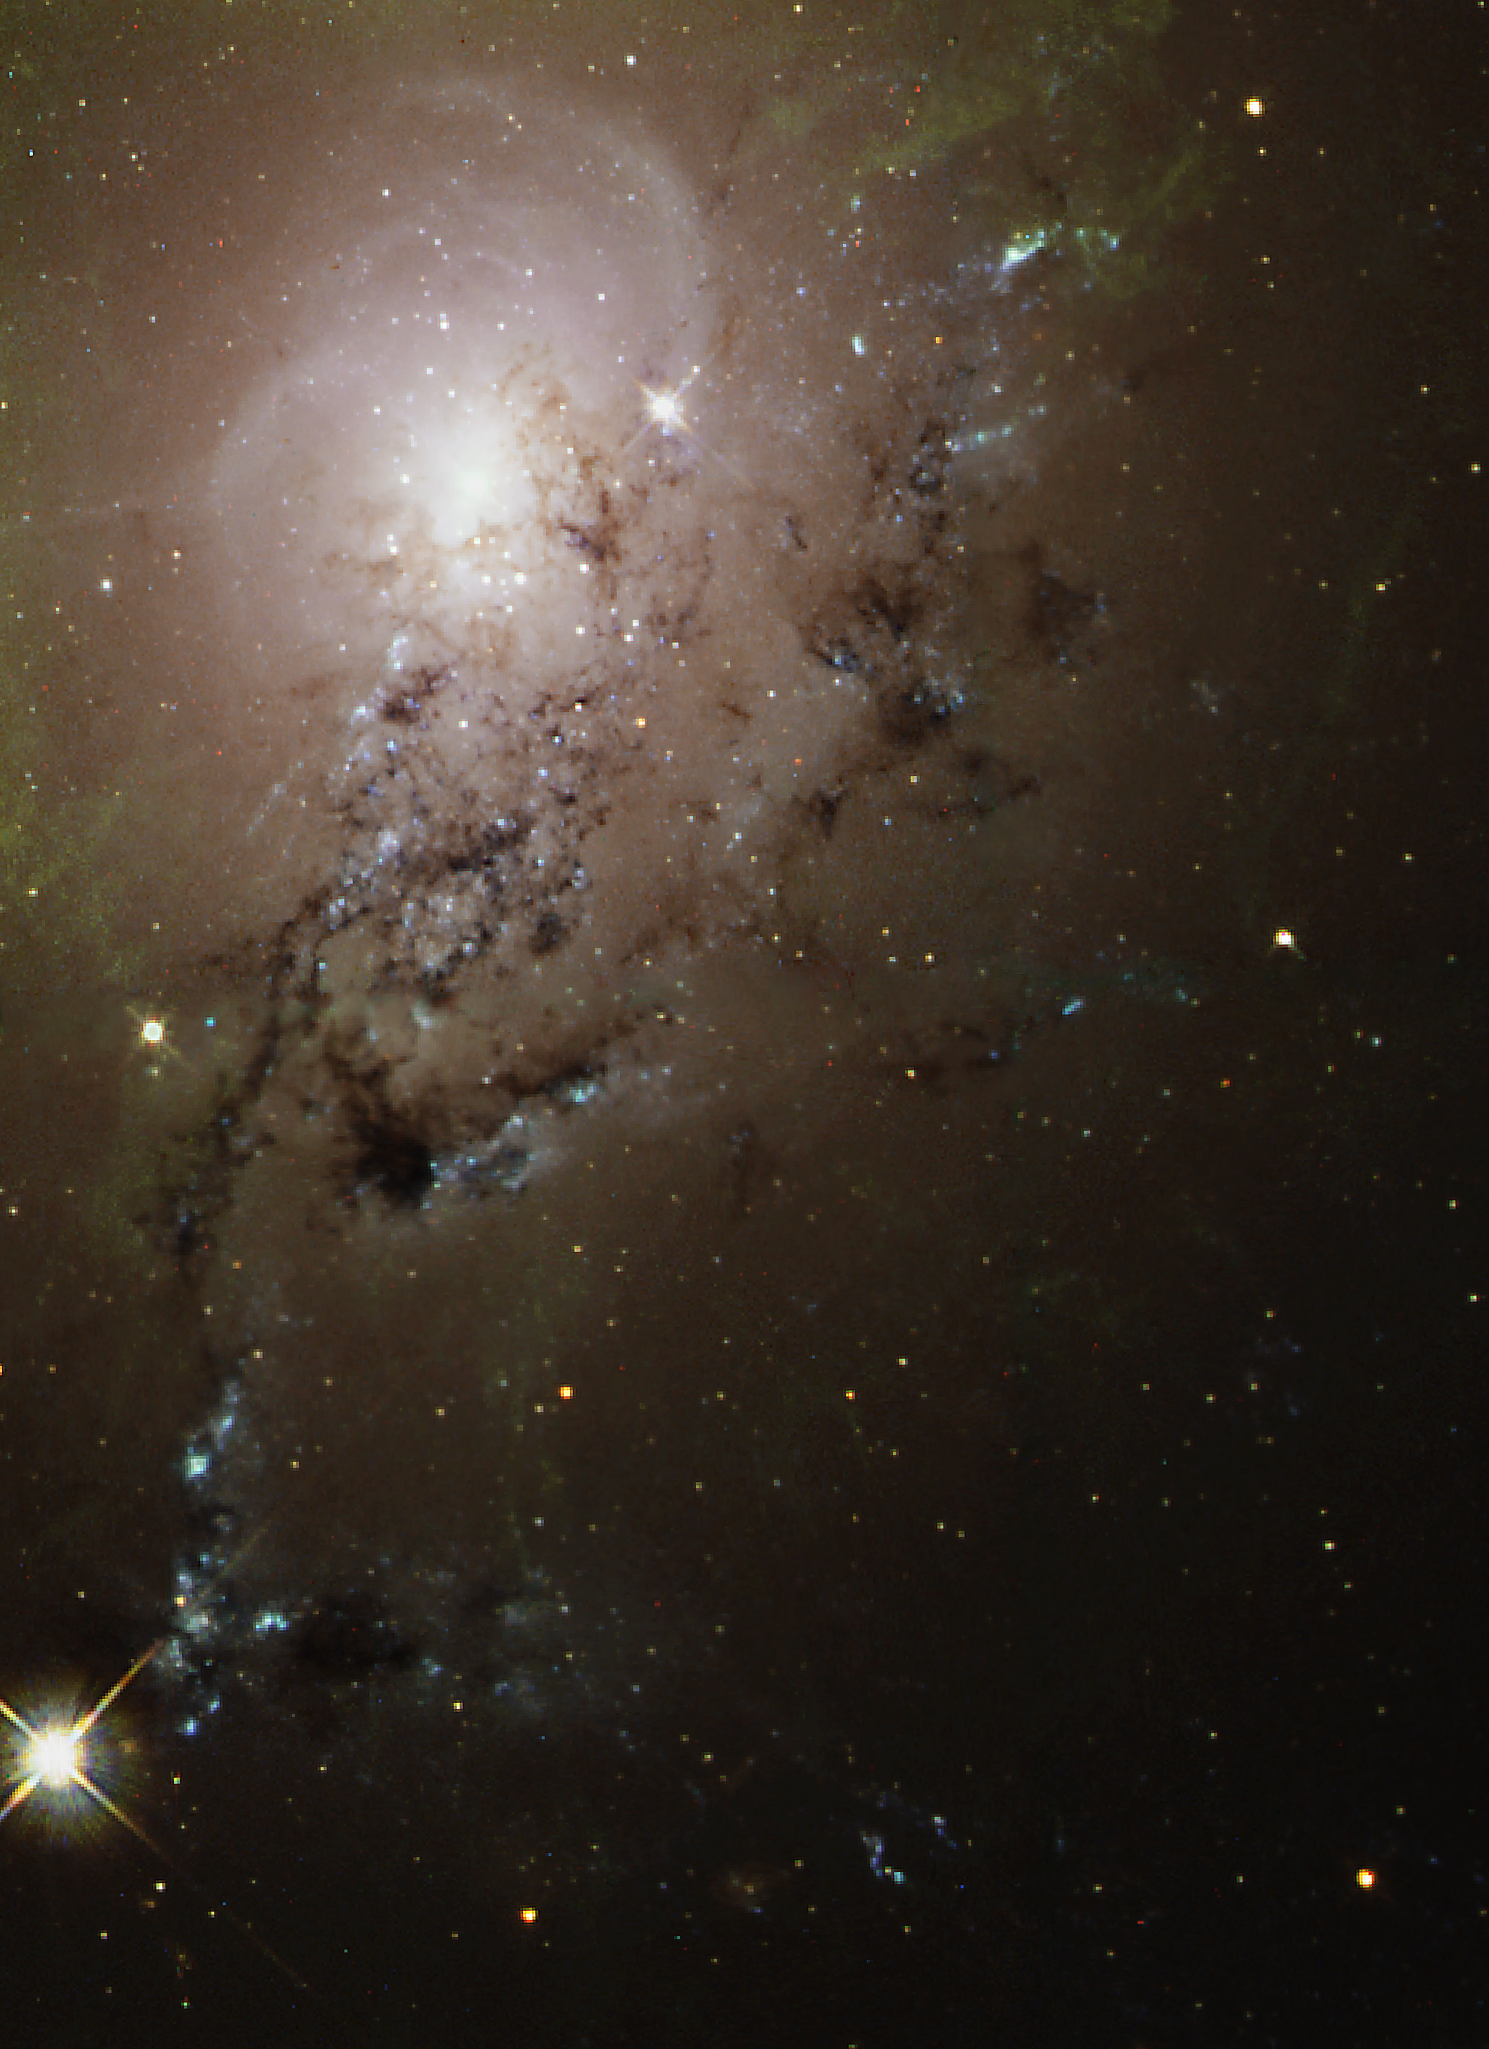

Freewheeling Galaxies Collide in a Blaze of Star Birth

A dusty spiral galaxy appears to be rotating on edge, like a pinwheel, as it slides through the larger, bright galaxy NGC 1275, in this NASA/ESA Hubble Space Telescope image.

These images, taken with Hubble's Wide Field Planetary Camera 2 (WFPC2), show traces of spiral structure accompanied by dramatic dust lanes and bright blue regions that mark areas of active star formation.

Credit: NASA/ESA and The Hubble Heritage Team (STScI/AURA)